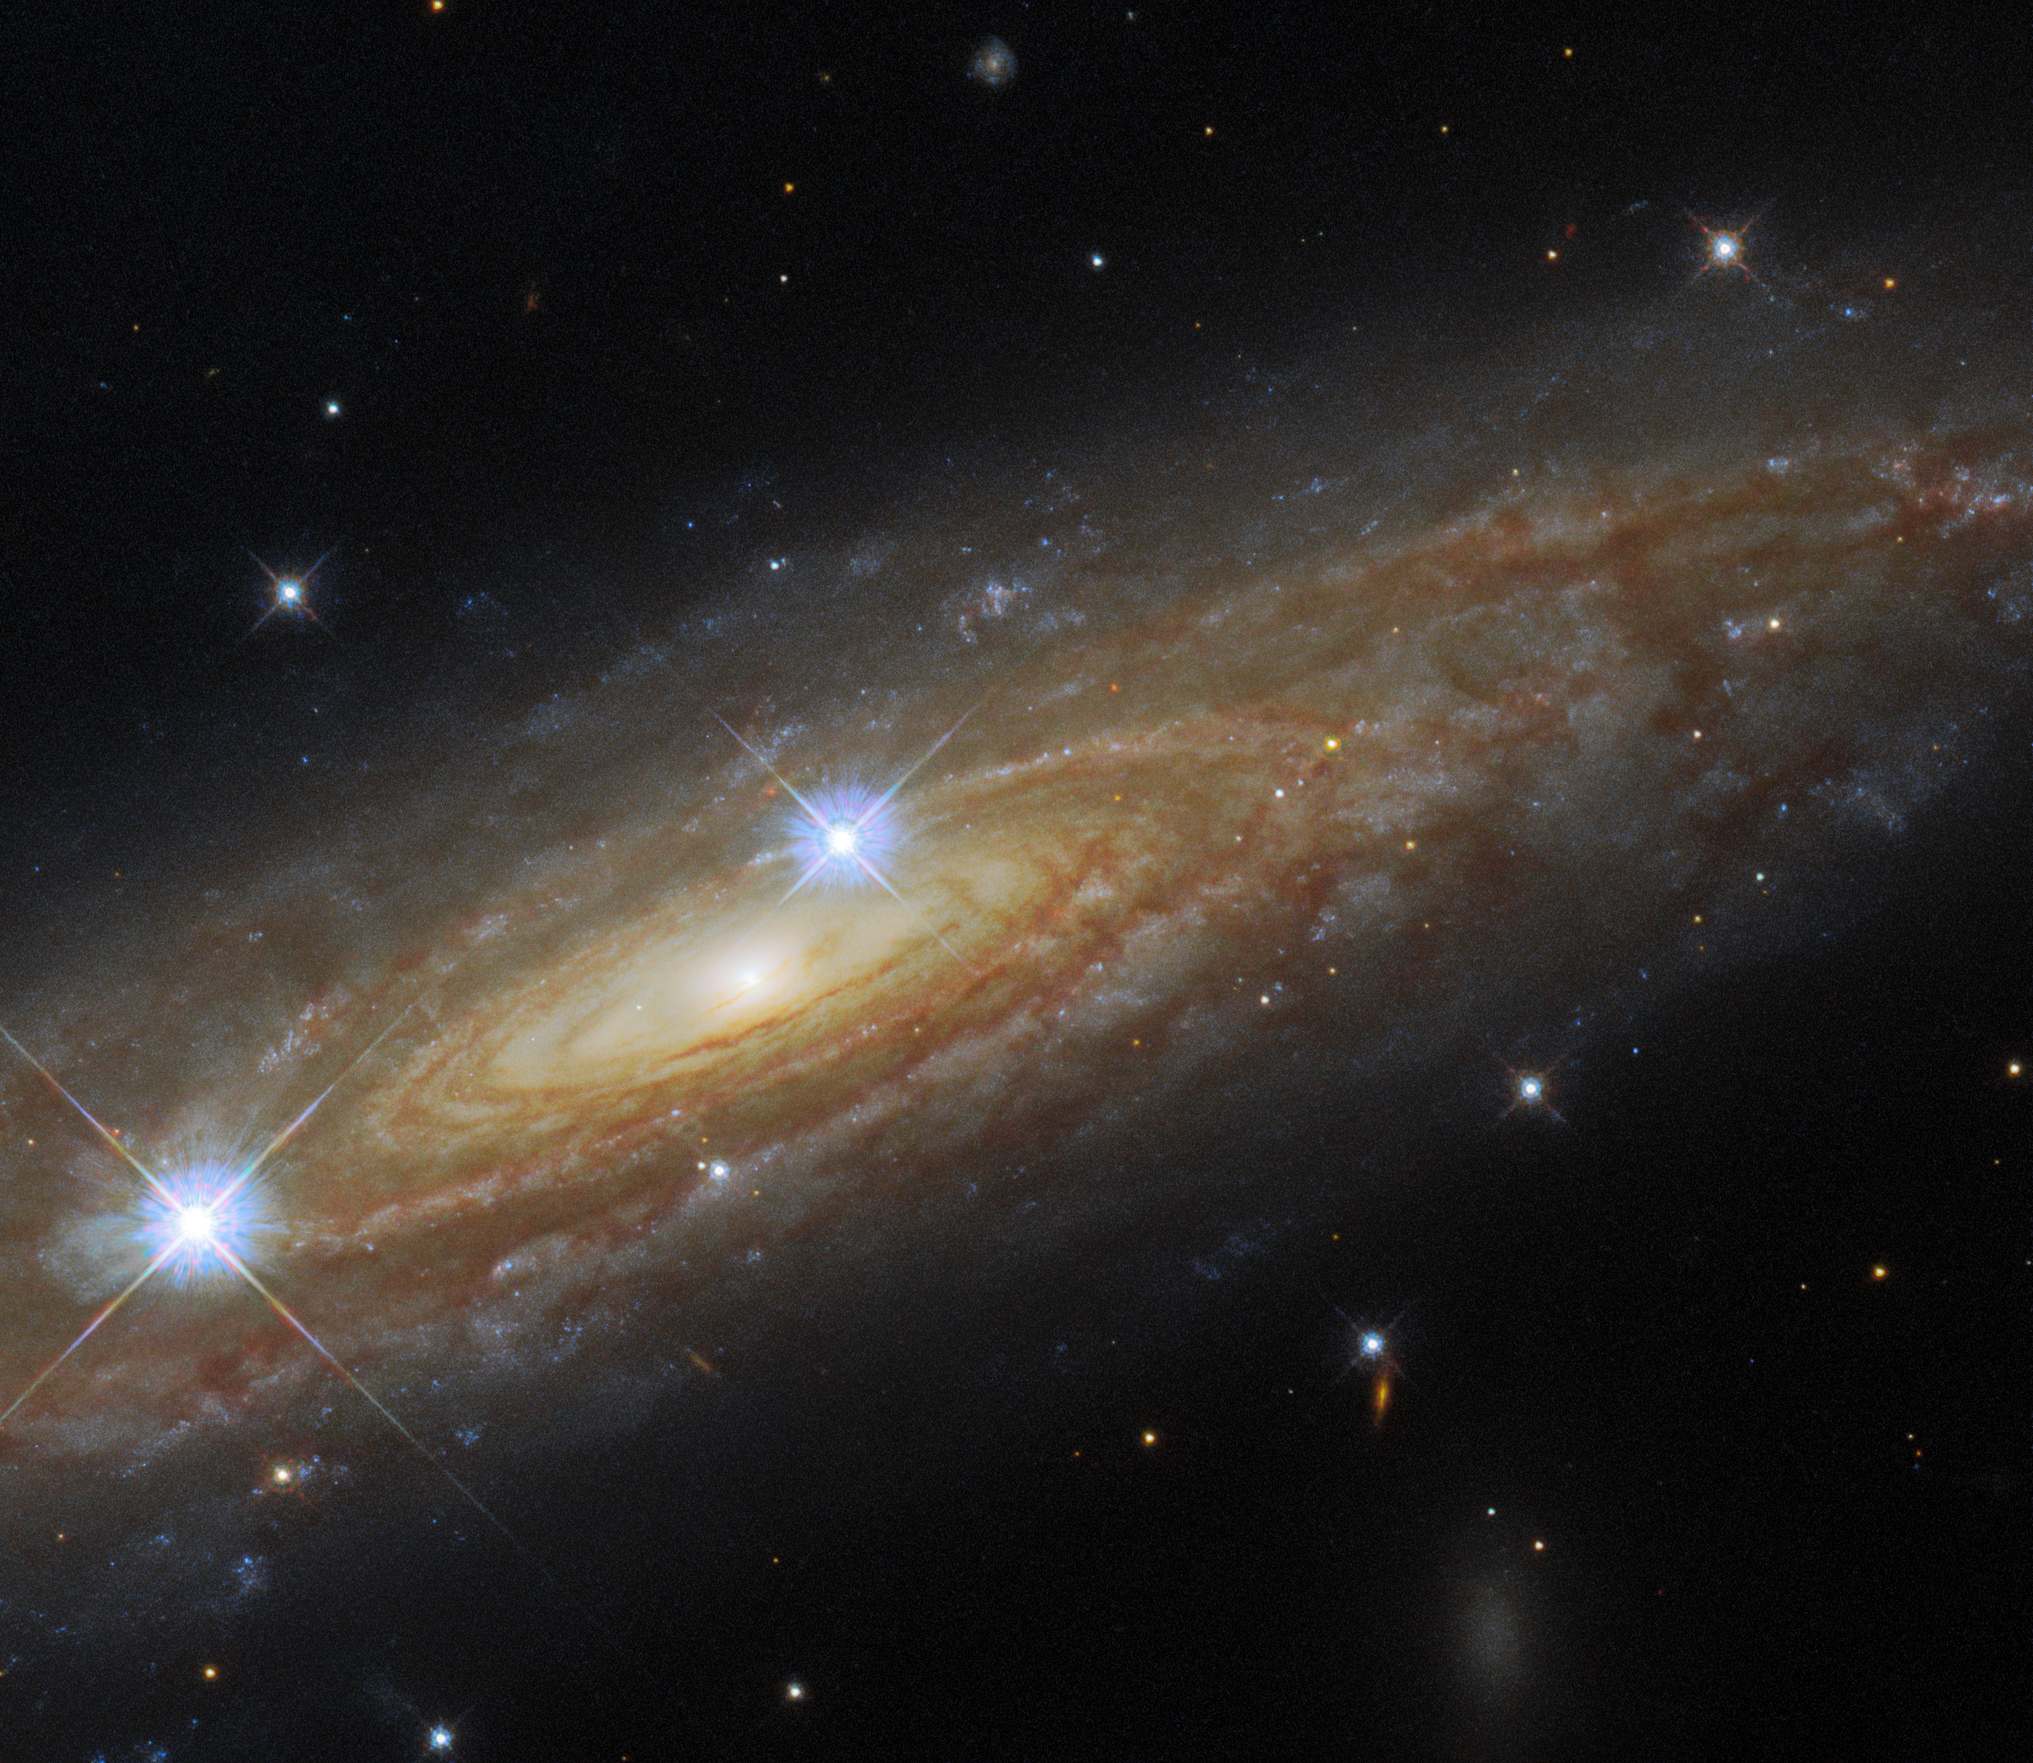

A Spectacular Side-On Spiral

This astronomical portrait from the NASA/ESA Hubble Space Telescope showcases an edge-on view of the majestic spiral galaxy UGC 11537. Hubble’s Wide Field Camera 3 has captured the tightly wound spiral arms swirling around the heart of UGC 11537 at infrared and visible wavelengths, showing both the bright bands of stars and the dark clouds of dust threading throughout the galaxy.

UGC 11537 is 230 million light-years away in the constellation Aquila, and lies close to the plane of the Milky Way. Being so close to the starry band of the Milky Way means that foreground stars from our own galaxy have crept into the image — the two prominent stars in front of UGC 11537 are interlopers from within the Milky Way. These bright foreground stars are surrounded by diffraction spikes — imaging artifacts caused by starlight interacting with Hubble’s inner structure.

This image came from a set of observations designed to help astronomers weigh supermassive black holes in distant galaxies. The combination of Hubble’s sharp-eyed observations and data from ground-based telescopes allowed astronomers to make detailed models of the mass of stars in these galaxies, which in turn helps constrain the mass of supermassive black holes.

Credit: ESA/Hubble & NASA, A. Seth